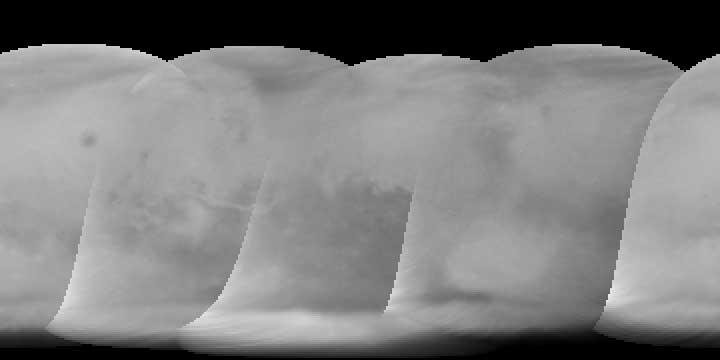

Global map, cylindrical projection

Image showing a global map of Mars (cylindrical projection).

A pair of eagle-eyed spacecraft - the NASA Mars Global Surveyor (MGS) and NASA/ESA Hubble Space Telescope - are giving amazed astronomers a ringside seat to the biggest global dust storm seen on Mars in several decades. The Martian dust storm, larger by far than any seen on Earth, has raised a cloud of dust that has engulfed the entire planet for several months.

Credit: J. Bell (Cornell University)